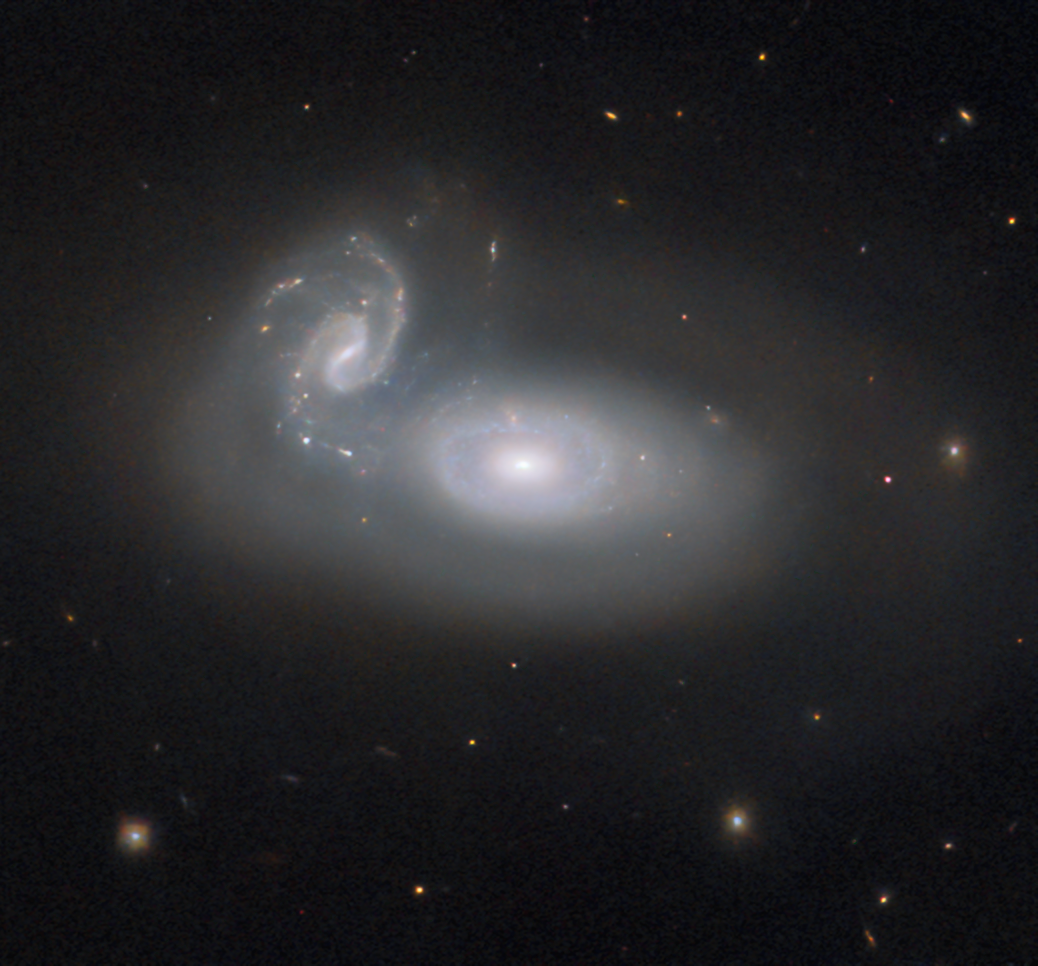

Tangled galaxies

Previously the Hubble Picture of the Week series has featured a jewel in the queen’s hair — a spiral galaxy in the constellation Coma Berenices, named for the hair of the historical Egyptian queen. However, that galaxy is only one of many known in this constellation. This week’s new image from the NASA/ESA Hubble Space Telescope depicts the cosmic tangle that is MCG+05-31-045, a pair of interacting galaxies located 390 million light-years away and a part of the so-called Coma galaxy cluster.

The Coma cluster is a particularly rich cluster and contains over a thousand known galaxies. Several can be easily seen with amateur telescopes. Most of them are elliptical galaxies, and that’s typical of a dense galaxy cluster like the Coma cluster: many elliptical galaxies are formed in close encounters between galaxies that stir them up, or even collisions that rip them apart. While the stars in the interacting galaxies can stay together, the gas in the galaxies is a different story — it’s twisted and compressed by gravitational forces, and rapidly used up to form new stars. When the hot, massive, blue stars die, there is little gas left to replace them with new generations of young stars. For interacting spiral galaxies, the regular orbits that produce their striking spiral arms are also disrupted. Whether through mergers or simple near misses, the result is a galaxy almost devoid of gas, with ageing stars orbiting in uncoordinated circles: an elliptical galaxy.

It’s very likely that a similar fate will befall MCG+05-31-045. As the smaller spiral galaxy is torn up and integrated into the larger galaxy, many new stars will form, and the hot, blue ones will quickly burn out, leaving cooler, redder stars behind in an elliptical galaxy much like the others in the Coma cluster. But this process won’t be complete for many millions of years — until then, Queen Berenice II will have to suffer the knots in her hair!

Credit: ESA/Hubble & NASA, R. J. Foley (UC Santa Cruz)